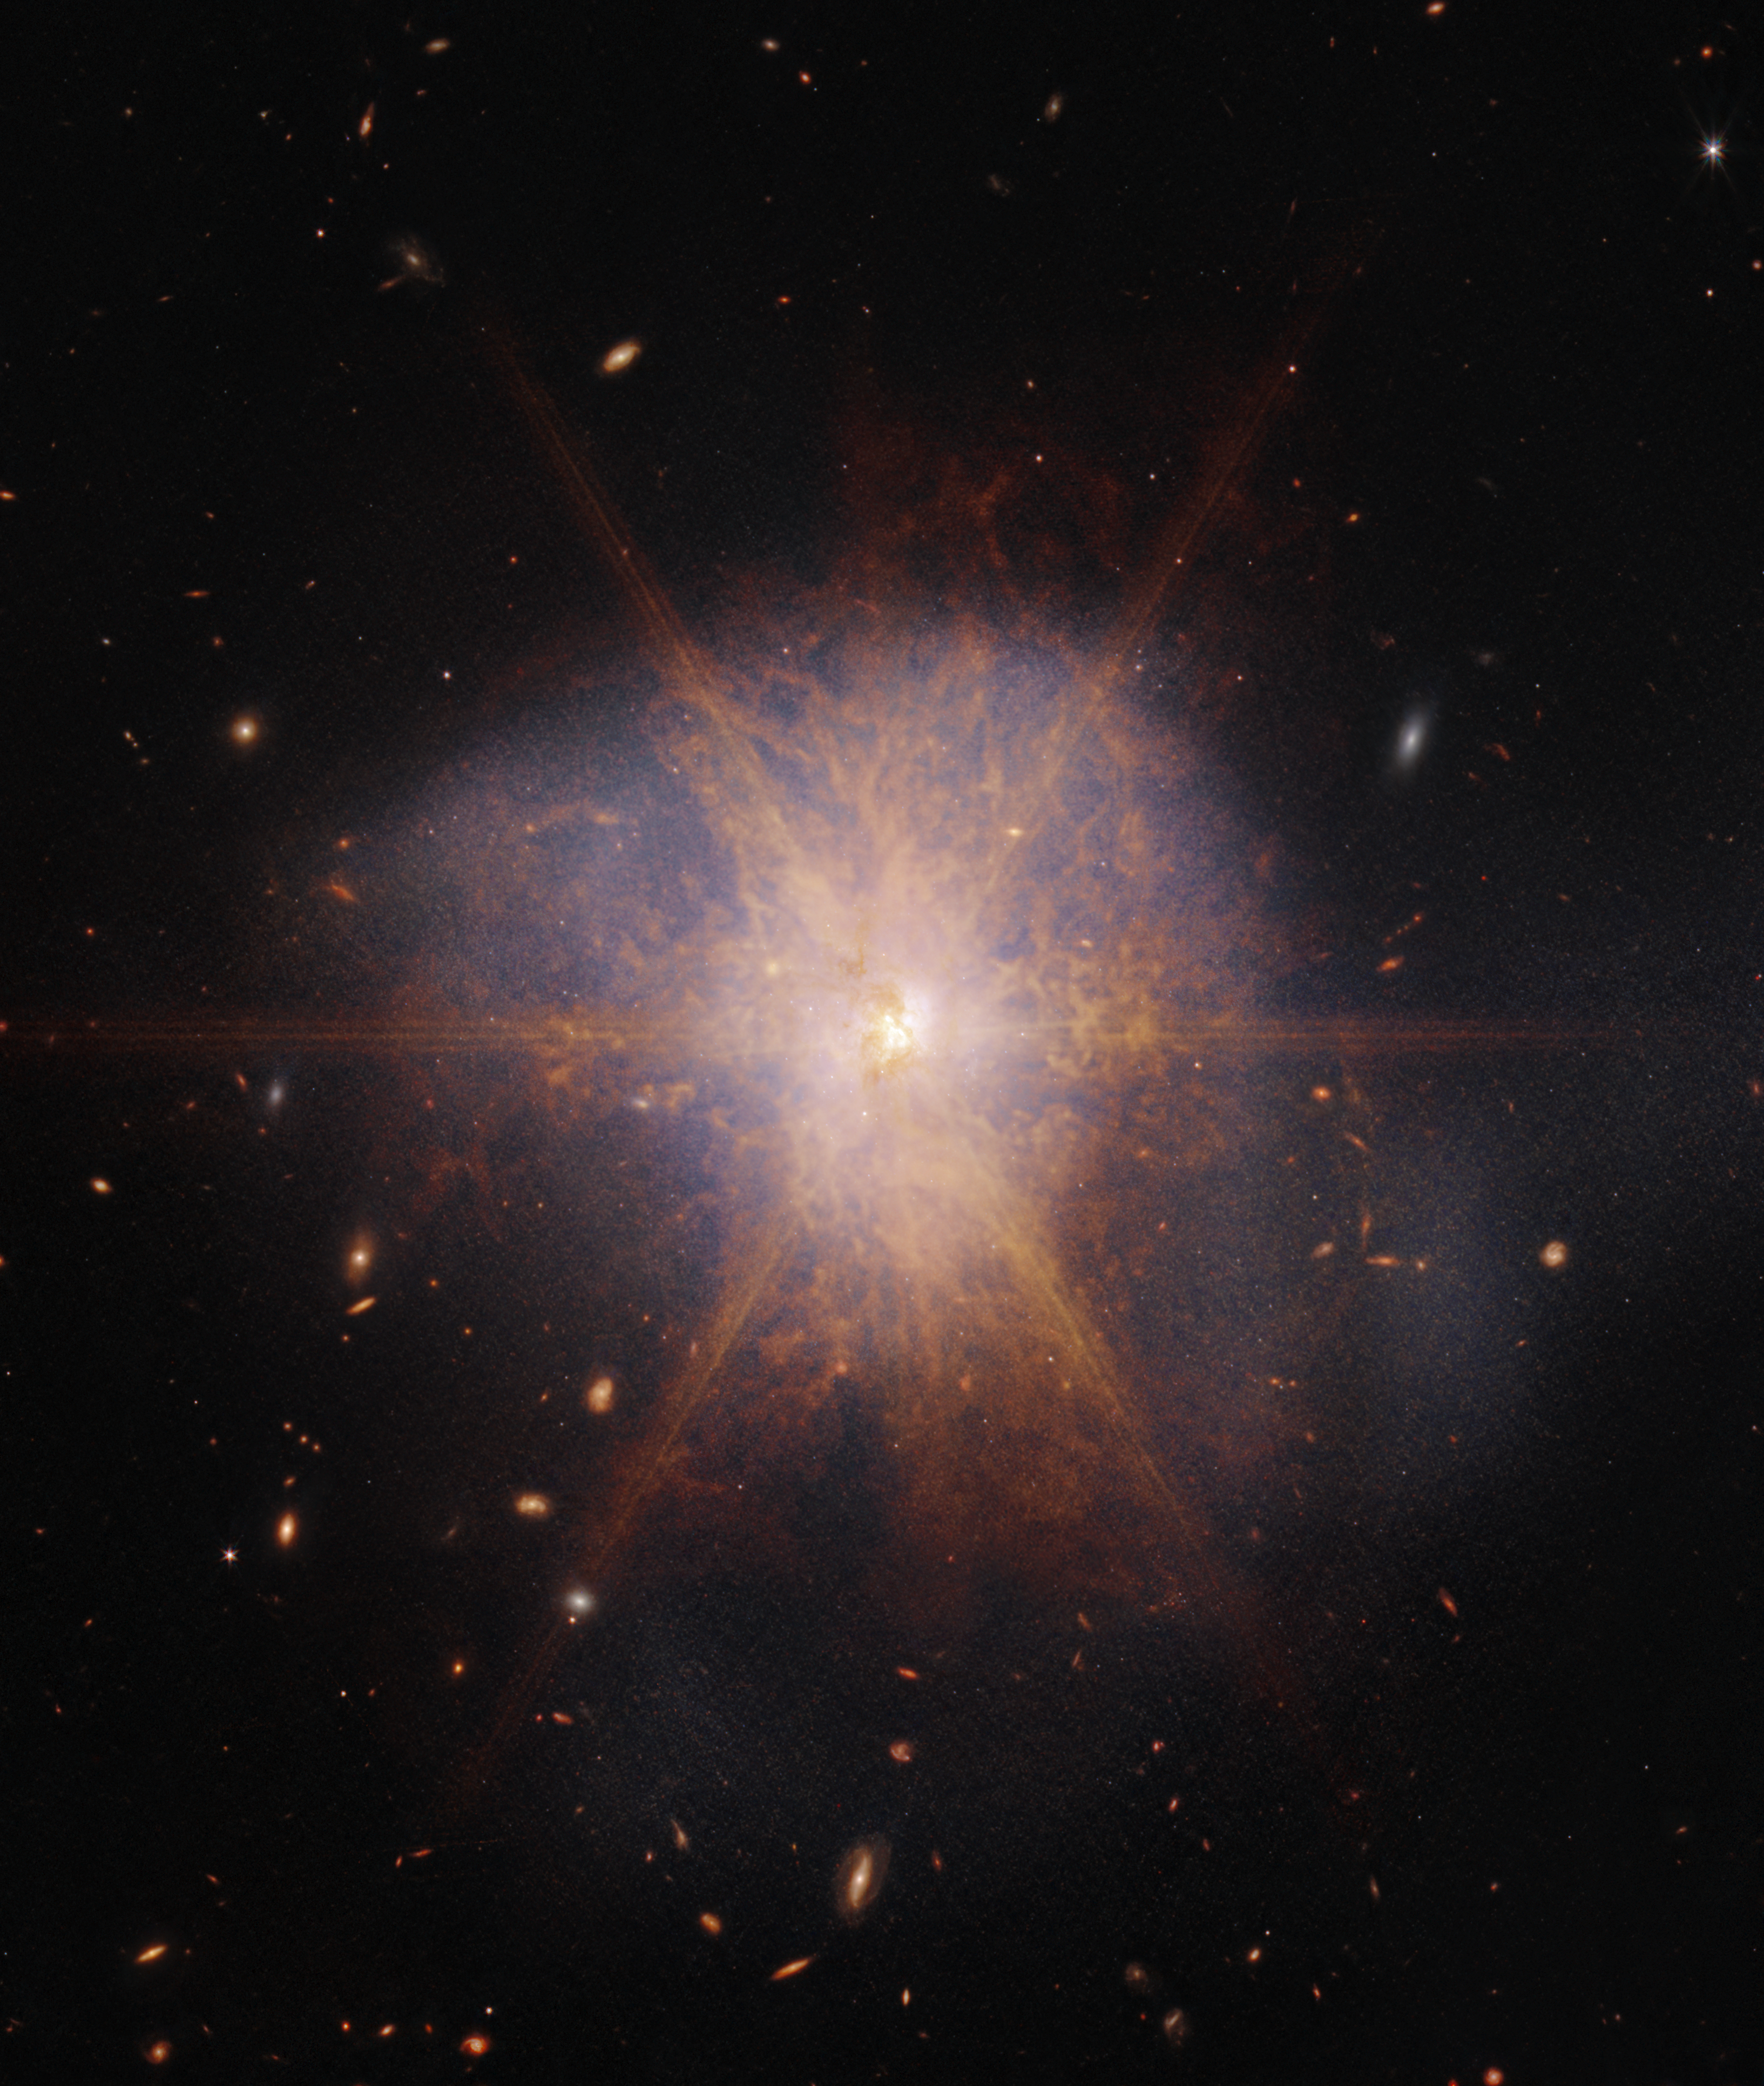

Webb captures the spectacular galactic merger Arp 220

Shining like a brilliant beacon amidst a sea of galaxies, Arp 220 lights up the night sky in this view from the NASA/ESA/CSA James Webb Space Telescope. Actually two spiral galaxies in the process of merging, Arp 220 glows brightest in infrared light, making it an ideal target for Webb. It is an ultra-luminous infrared galaxy (ULIRG) with a luminosity of more than a trillion suns. In comparison, our Milky Way galaxy has a much more modest luminosity of about ten billion suns.

Located 250 million light-years away in the constellation of Serpens, the Serpent, Arp 220 is the 220th object in Halton Arp’s Atlas of Peculiar Galaxies. It is the nearest ULIRG and the brightest of the three galactic mergers closest to Earth.

The collision of the two spiral galaxies began about 700 million years ago. It sparked an enormous burst of star formation. About 200 huge star clusters reside in a packed, dusty region about 5,000 light-years across (about 5 percent of the Milky Way’s diameter). The amount of gas in this tiny region is equal to all of the gas in the entire Milky Way galaxy.

Previous radio telescope observations revealed about 100 supernova remnants in an area of less than 500 light-years. The NASA/ESA Hubble Space Telescope uncovered the cores of the parent galaxies 1,200 light-years apart. Each of the cores has a rotating, star-forming ring blasting out the dazzling infrared light so apparent in this Webb view. This glaring light creates diffraction spikes — the starburst feature that dominates this image.

On the outskirts of this merger, Webb reveals faint tidal tails, or material drawn off the galaxies by gravity, represented in blue — evidence of the galactic dance that is occurring. Organic material represented in reddish-orange appears in streams and filaments across Arp 220.

Webb viewed Arp 220 with its Near-Infrared Camera (NIRCam) and Mid-Infrared Instrument (MIRI).

Credit: NASA, ESA, CSA, K. Pontoppidan (STScI), A. Pagan (STScI)